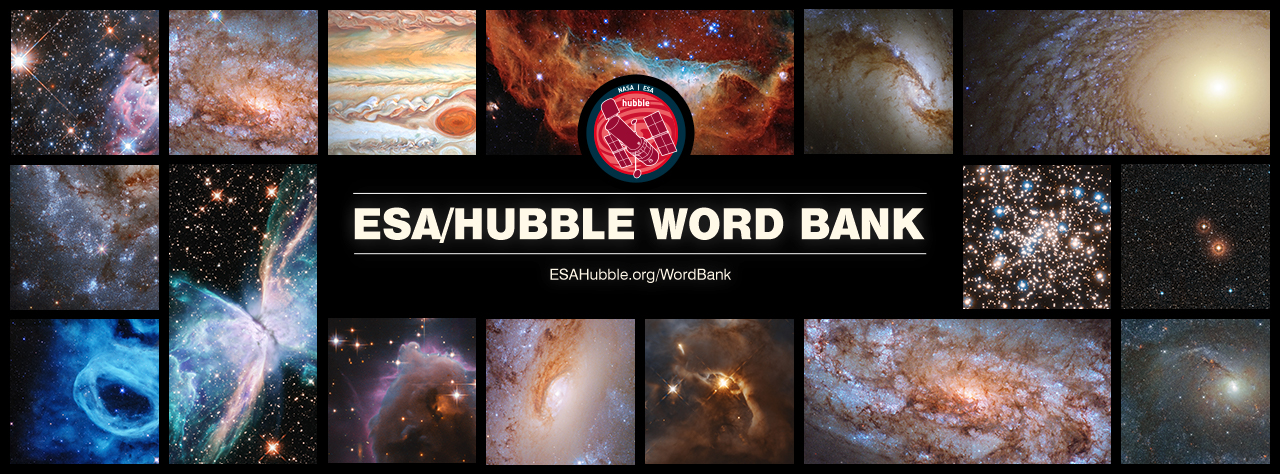

The ESA/Hubble Word Bank

The latest project developed by the ESA/Hubble outreach team is the ESA/Hubble Word Bank. This resource was developed to be an informative and educative resource for students, parents, educators, communicators, and the general public alike. Each of the words featured in this unique glossary is accompanied by a simple definition and an explanation of various astronomical concepts and objects in simple and accessible language. These descriptions also provide context and connections to Hubble’s relevance and contributions to the respective areas or objects of research.

Credit: ESA/Hubble